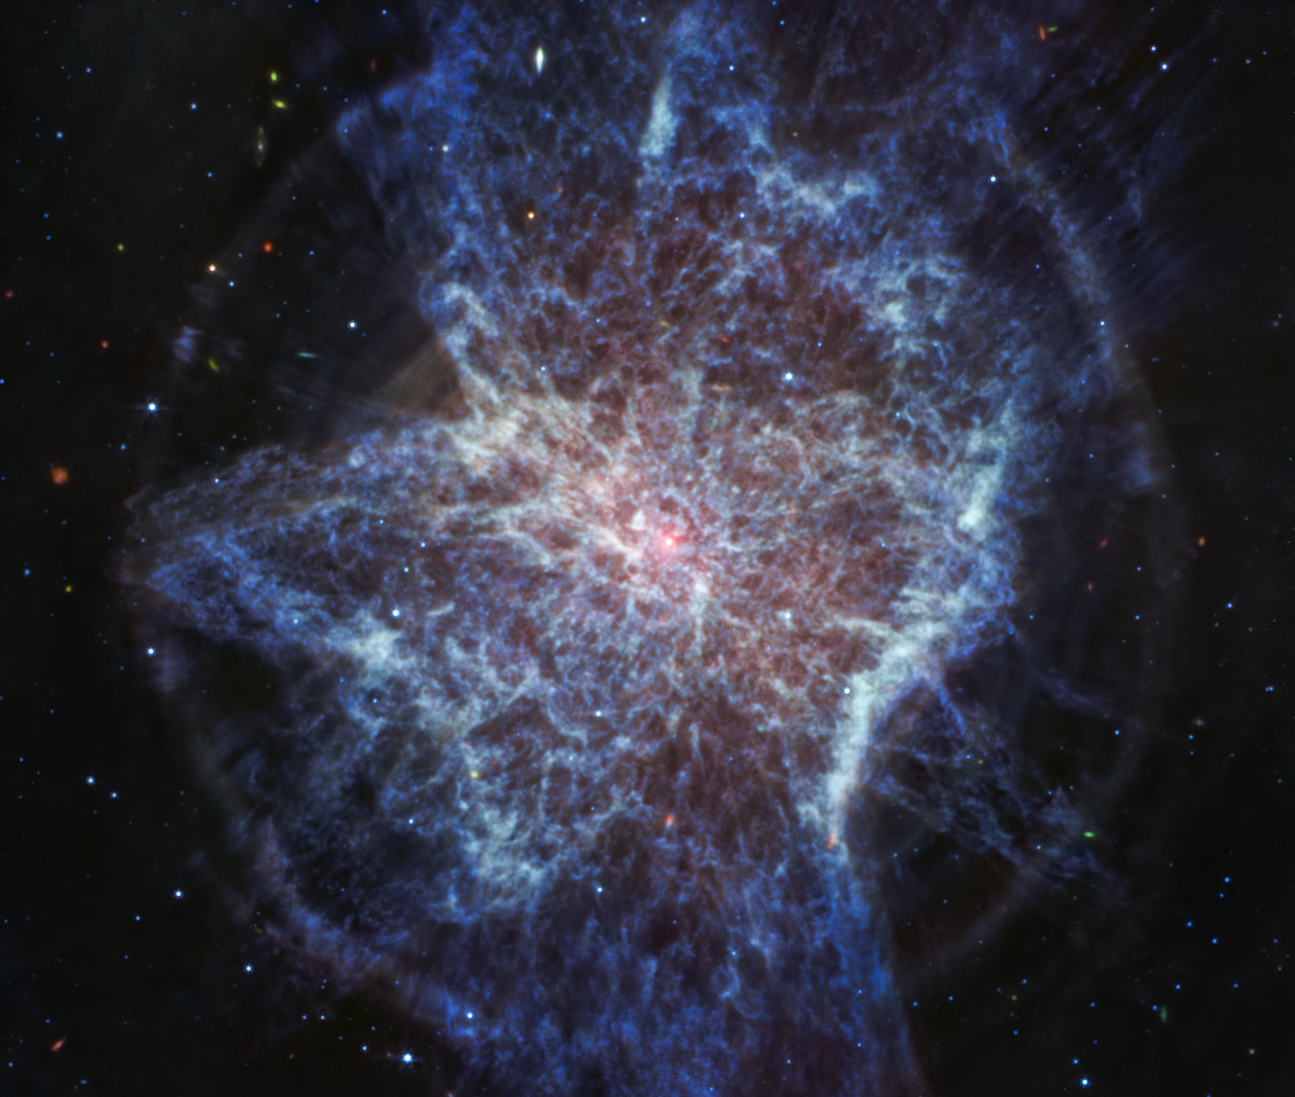

NGC 6072 (MIRI image)

The mid-infrared view of planetary nebula NGC 6072 from the NASA/ESA/CSA James Webb Space Telescope shows expanding circular shells around the outflows from the dying central star, which astronomers suspect is that pinkish white dot at the centre of the image. The longer wavelengths captured by Webb’s MIRI (Mid-Infrared Instrument) highlight the dust being cast off by the central dying star.

In this image, the blue represents cool molecular gas seen in red in the image from Webb’s NIRCam (Near-Infrared Camera) due to colour mapping.

Credit: NASA, ESA, CSA, STScI